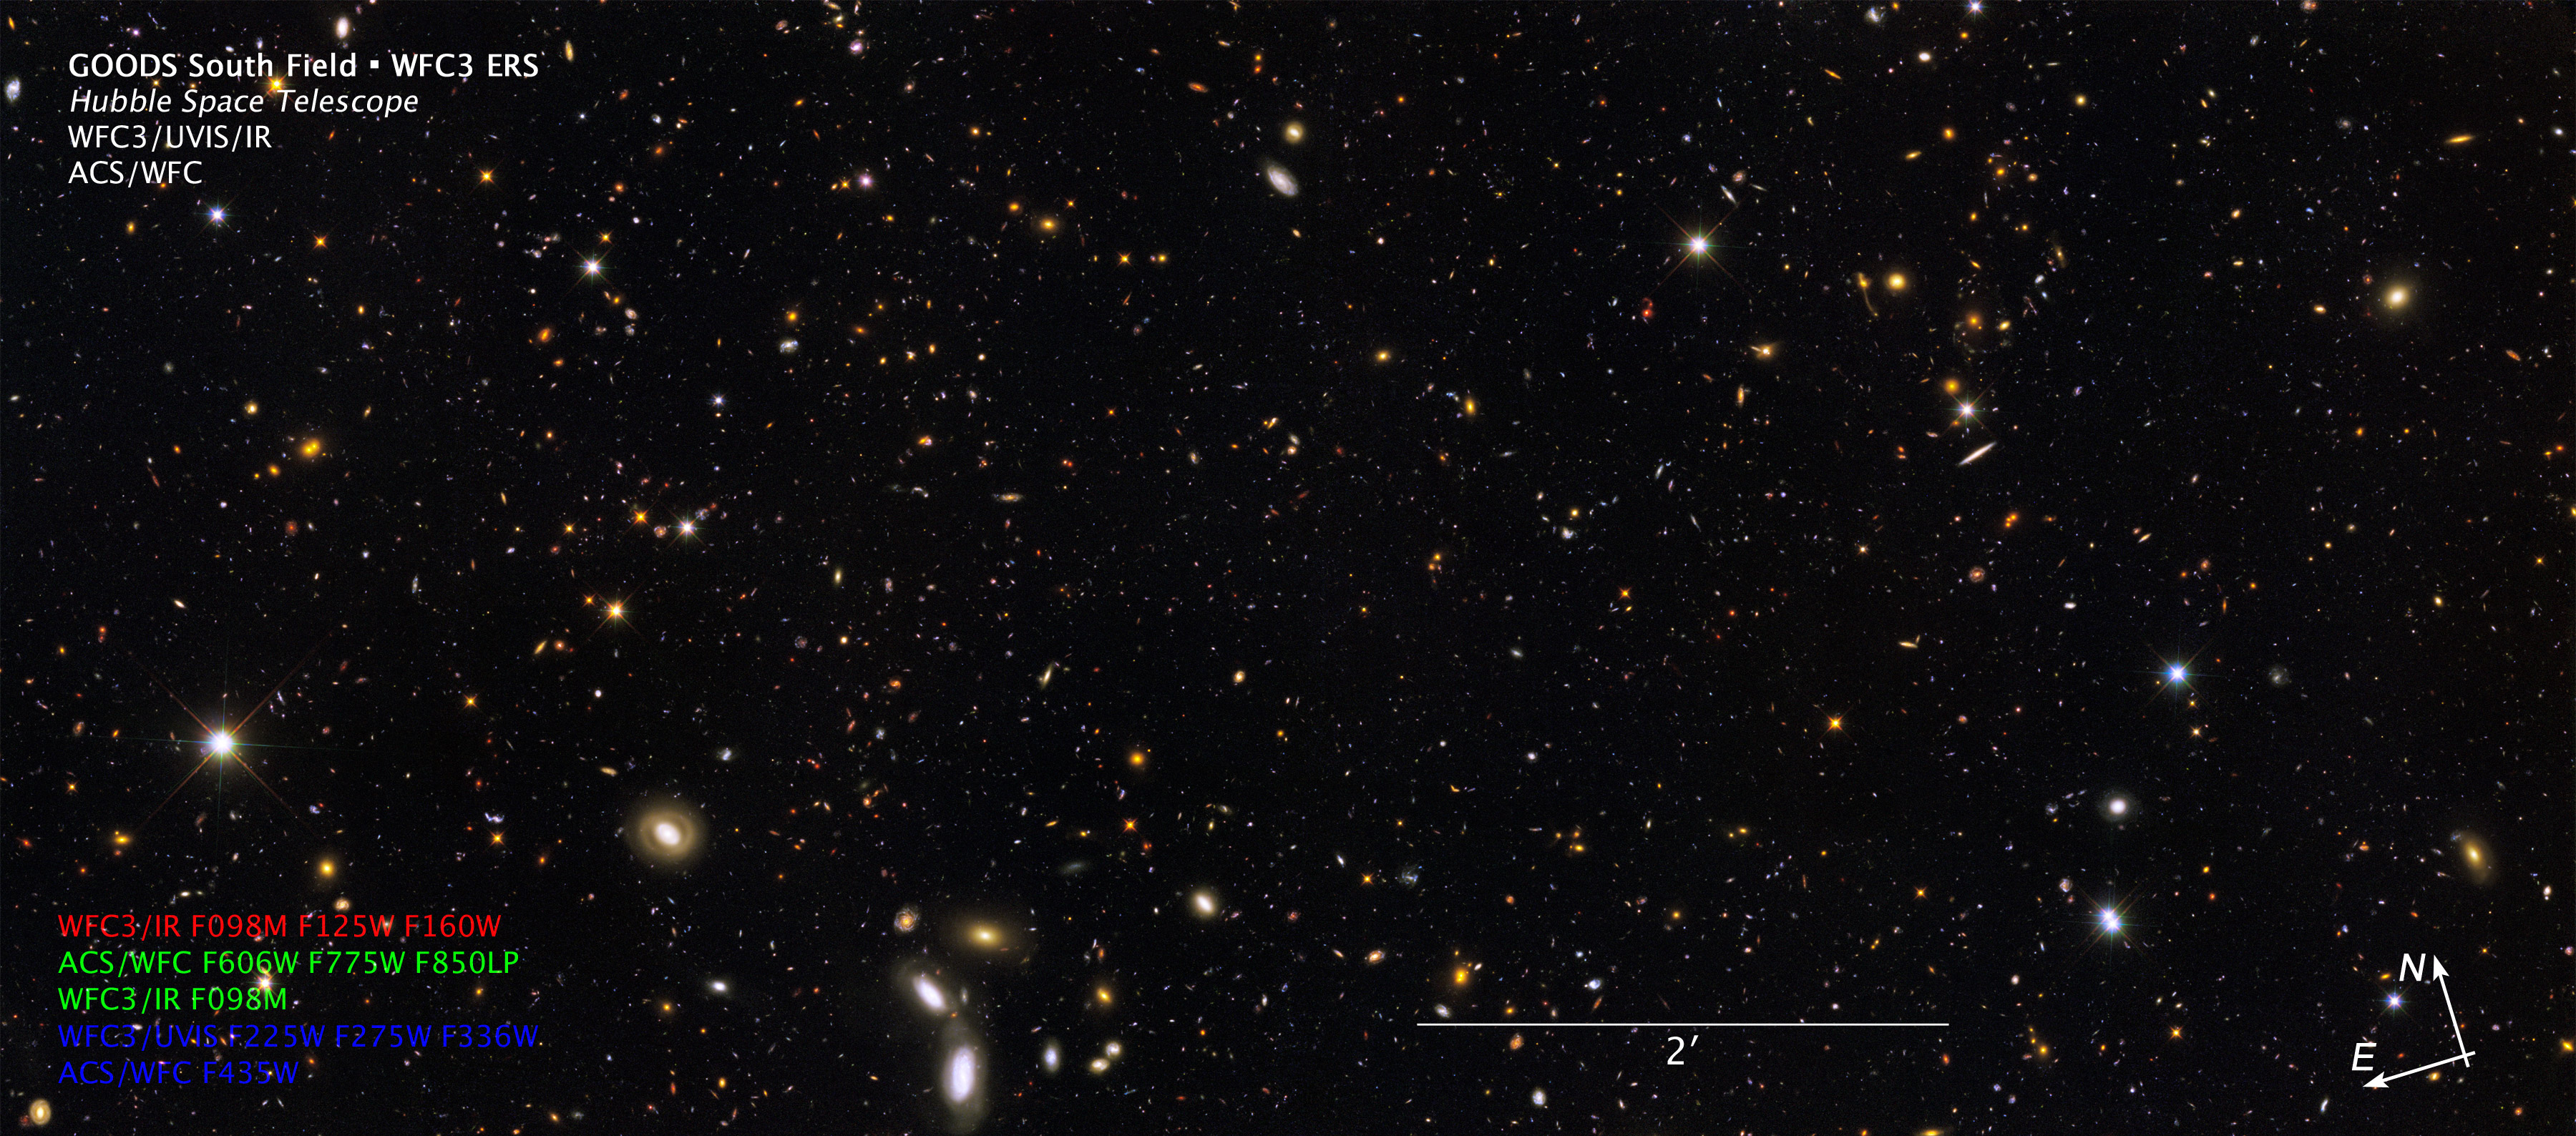

Compass and Scale Image of the GOODS/ERS2 Field

Compass and Scale Image from the large galaxy census called the Great Observatories Origins Deep Survey (GOODS), a deep-sky study by several observatories to trace the evolution of galaxies.

Credit: NASA, ESA, R. Windhorst, S. Cohen, M. Mechtley, and M. Rutkowski (Arizona State University, Tempe), R. O'Connell (University of Virginia), P. McCarthy (Carnegie Observatories), N. Hathi (University of California, Riverside), R. Ryan (University of California, Davis), H. Yan (Ohio State University), A. Koekemoer (Space Telescope Science Institute) and Z. Levay (STScI)